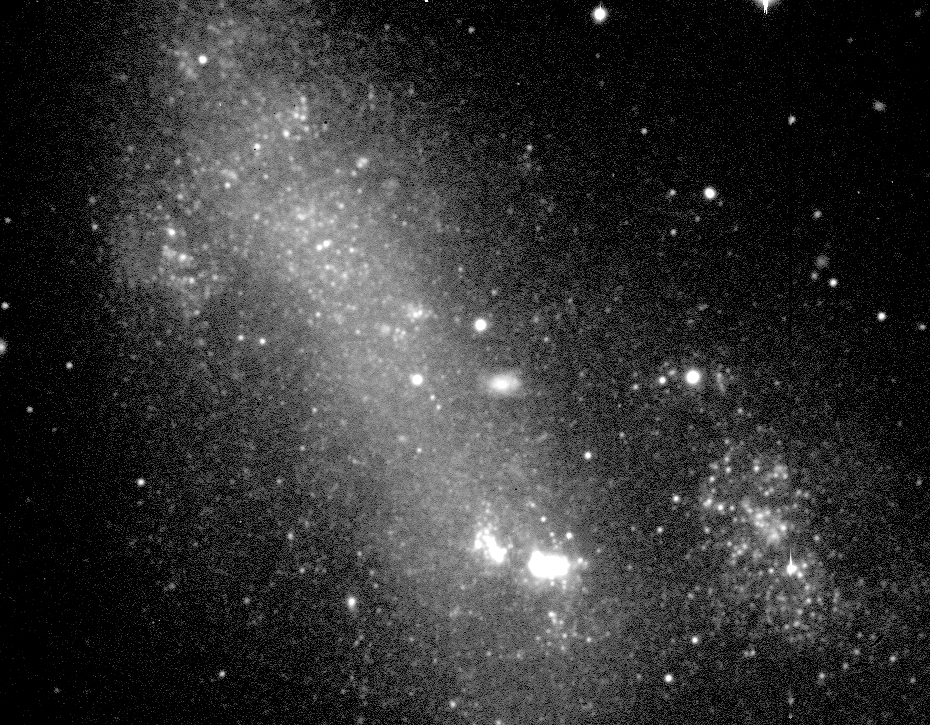

Star-Forming Region in Galaxy NGC 2366

A black and white (visual) image of the irregular galaxy NGC 2366 obtained at the Canada-France-Hawaii (CFHT) 3.6-meter telescope on Mauna Kea on February 7, 1996.

Credit: Laurent Drissen and Yvan Dutil/CFHT and NASA/ESA